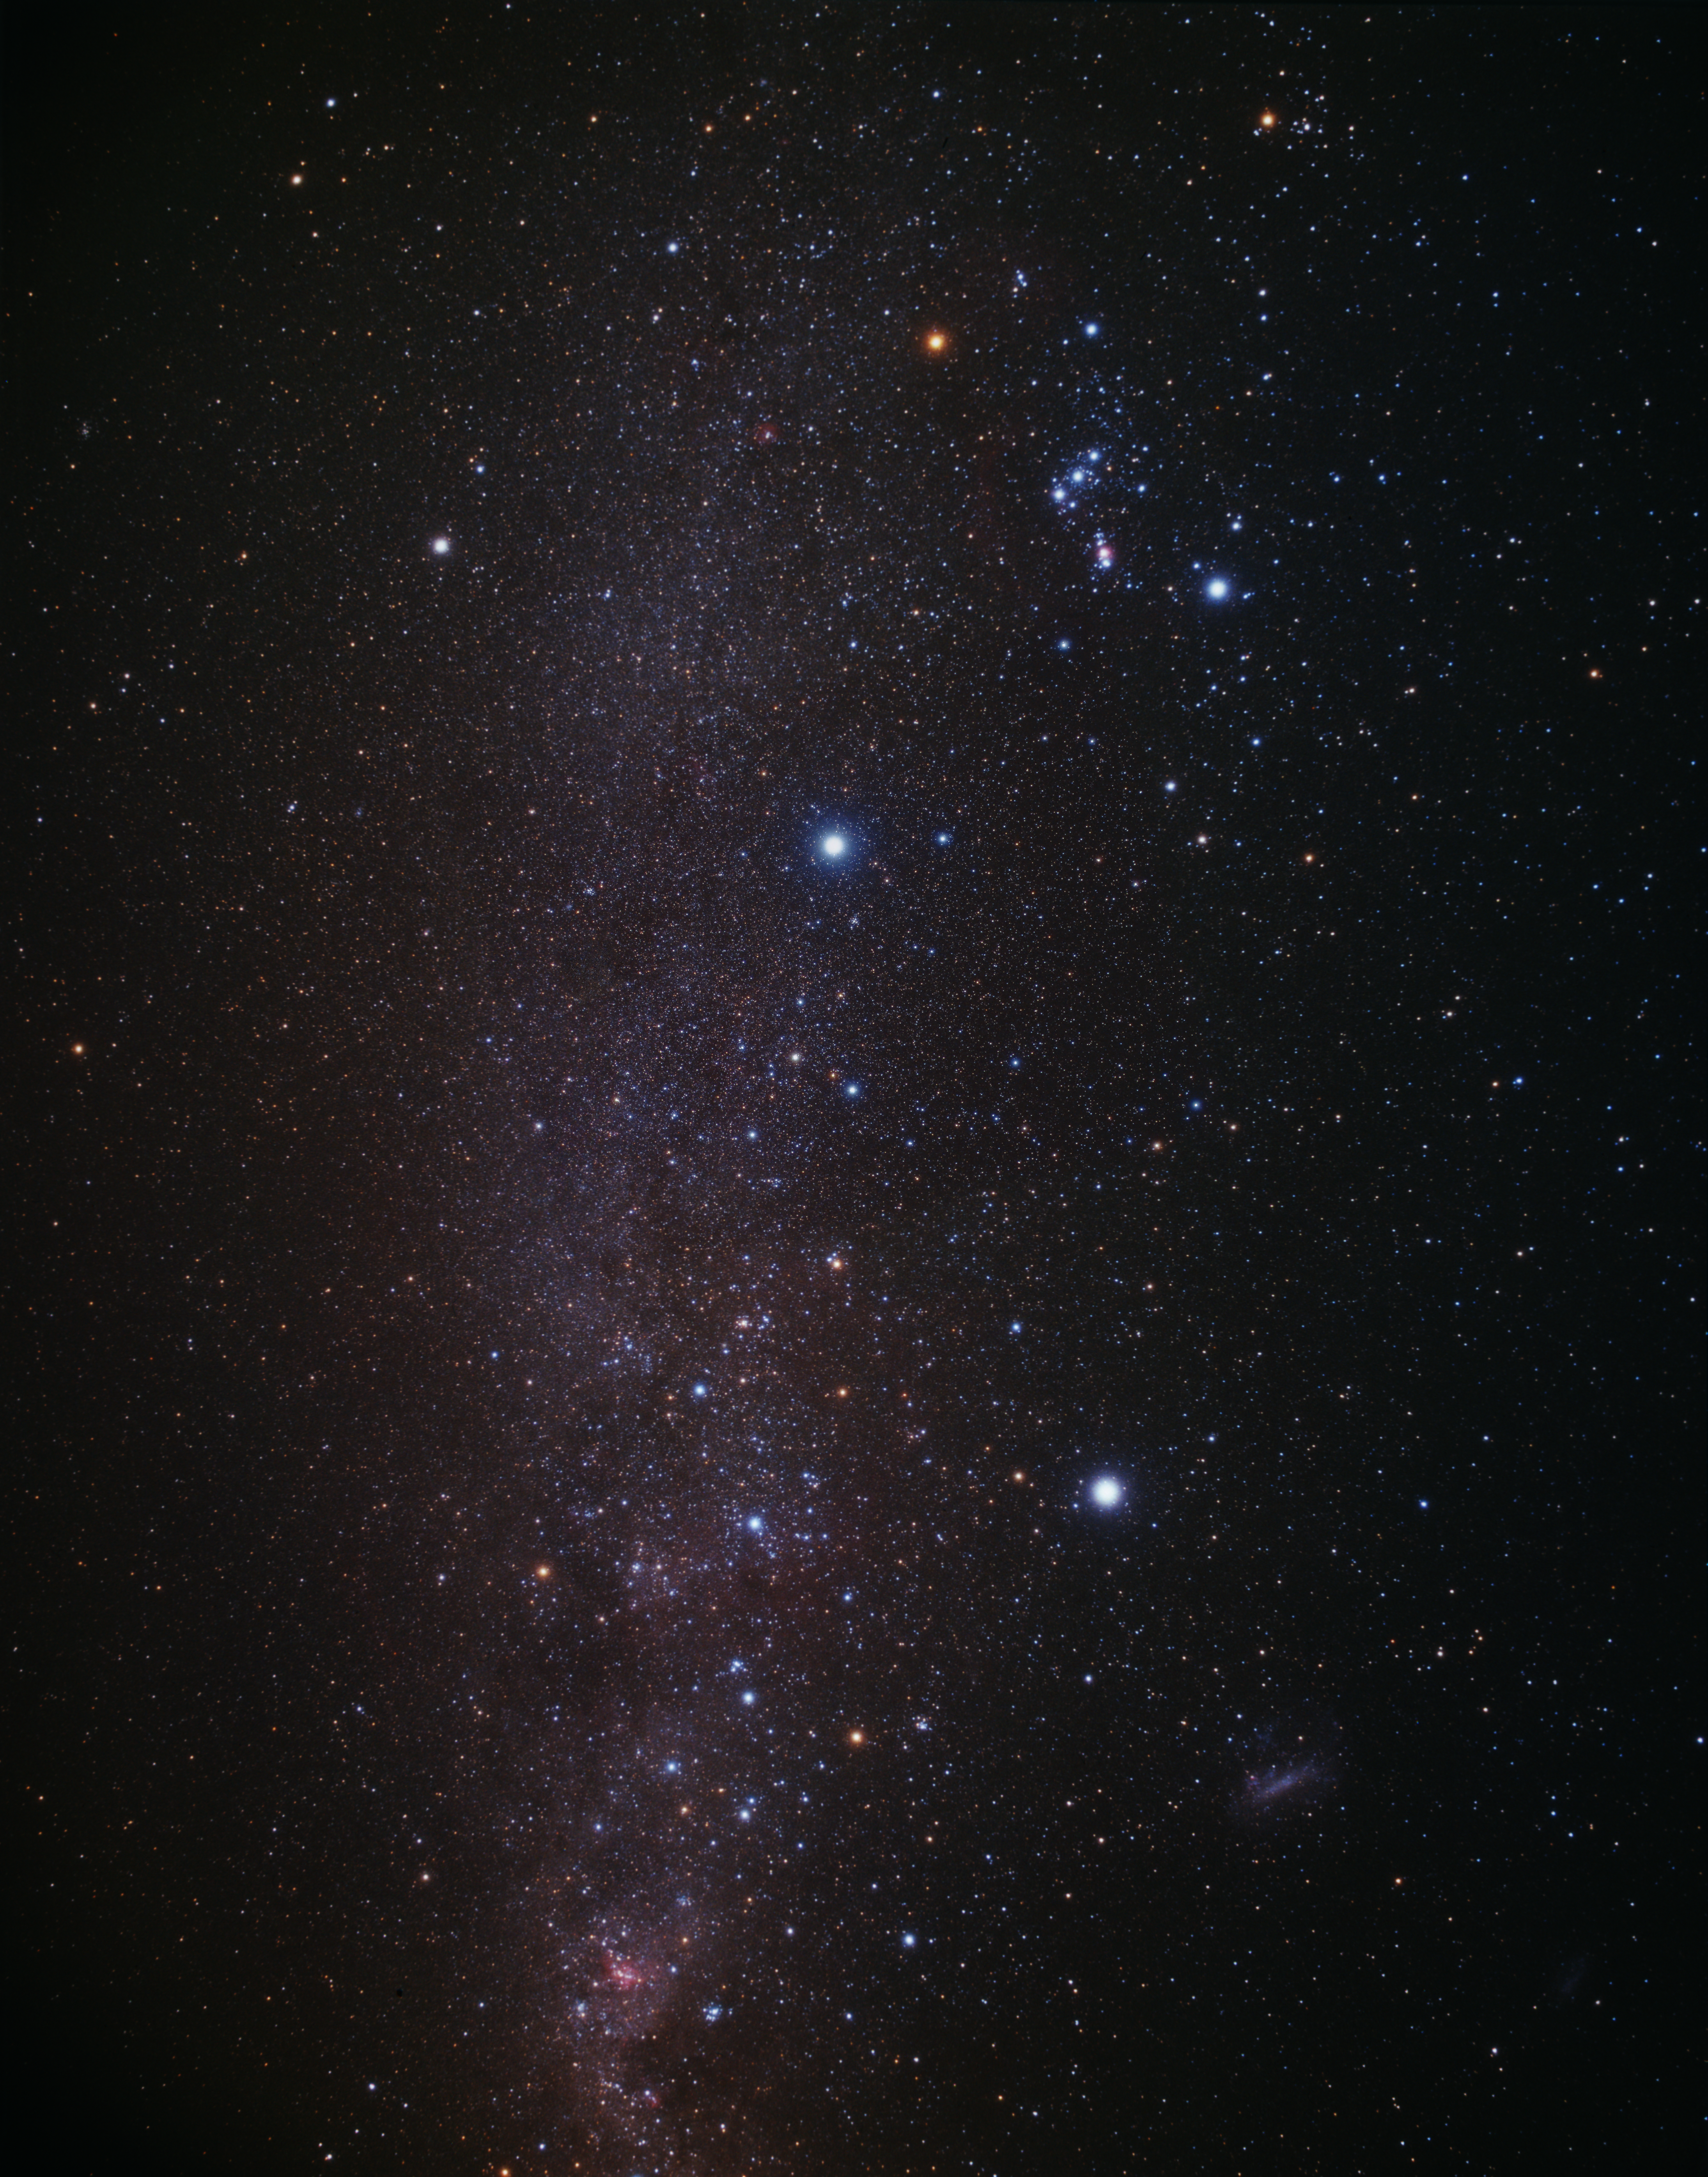

The southern sky with the Dorado constellation (ground-based image)

A wide field image showing the Southern Milky-Way patch and the area where NGC 1672 is in the constellation of Dorado (on the right part of the image).

Credit: A. Fujii